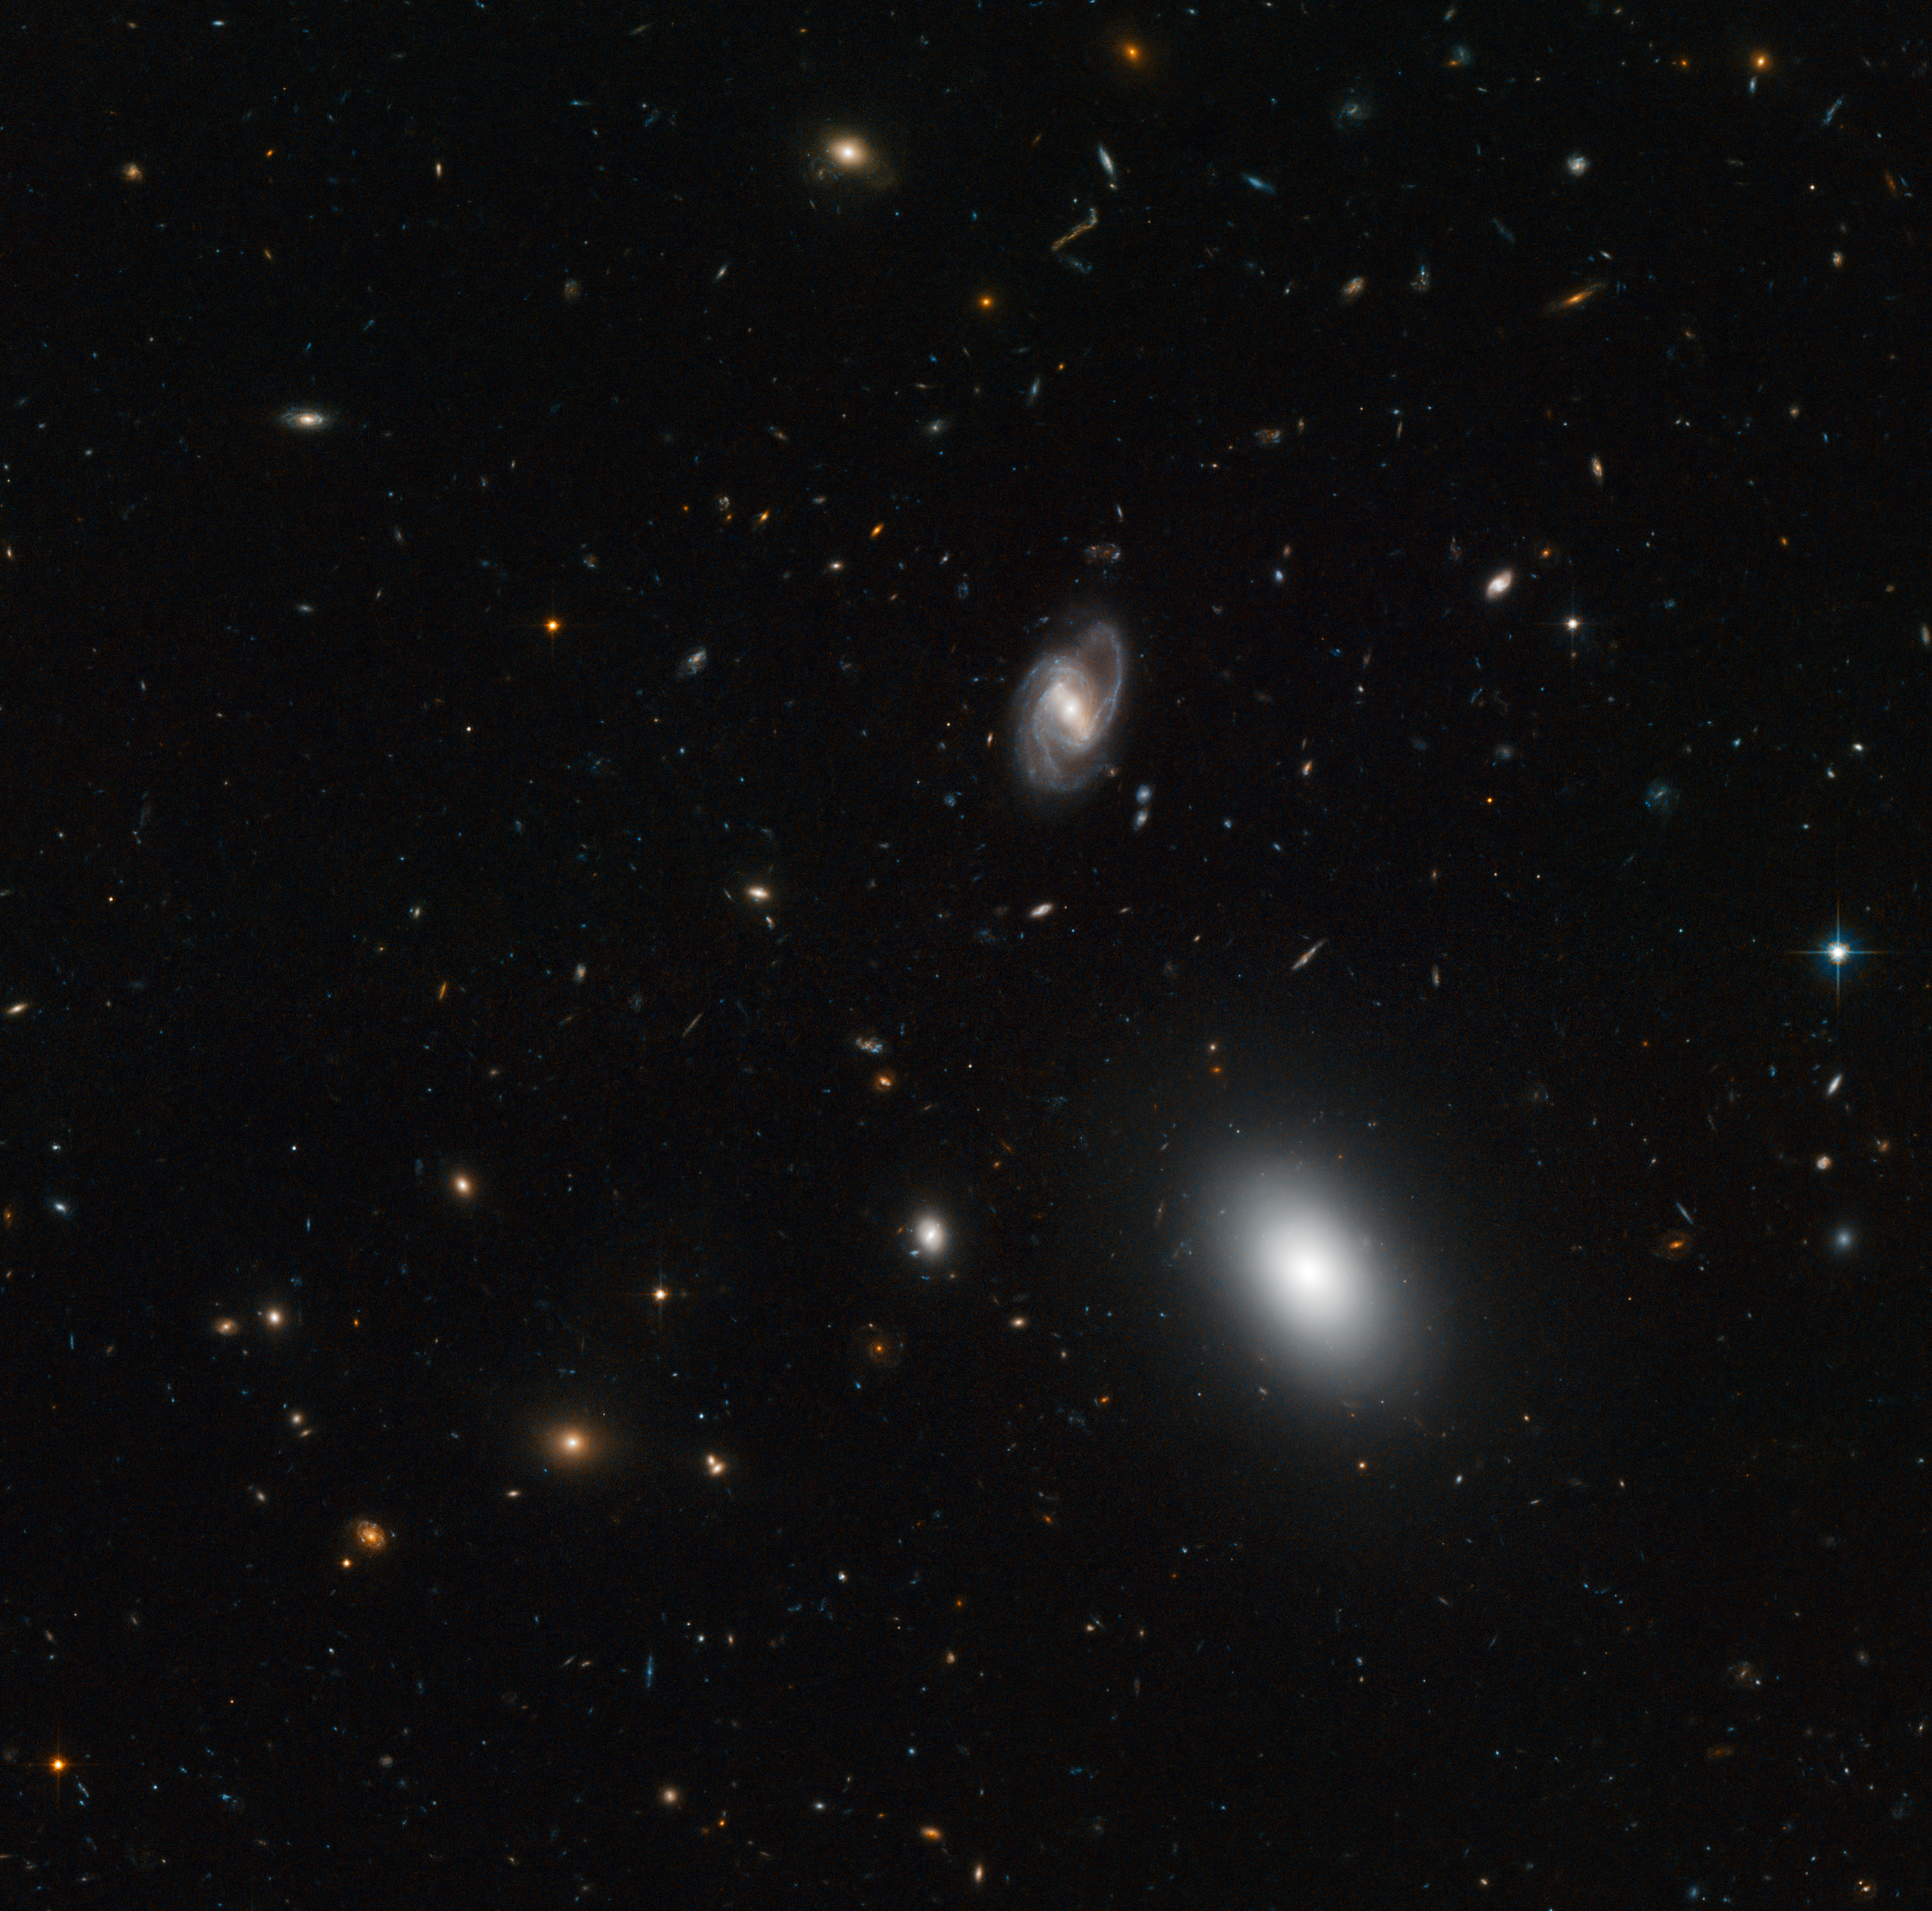

A snapshot of galactic evolution

Galaxies come in a variety of shapes and sizes, and these features change as they evolve. Some, like the galaxy in the centre of this NASA/ESA Hubble Space Telescope image, are beautiful spirals with graceful curved arms, while others are fuzzy oval-shaped blobs like the large object showing up near the bottom right of the frame. Others still are rather irregular in shape, such as the orange galaxy at the top of the image, which resembles a tiny wobbling string.

This picture is one of the few hundred exposures taken with Hubble’s Advanced Camera for Surveys to assemble the “Extended Groth Strip”. This strip, named after the Princeton University astronomer Edward Groth, is a composite picture of a rectangular region of the sky in the constellation of Ursa Major. It covers a relatively small area in the sky — equivalent to roughly the width of a finger stretched at arms’ length — but includes at least 50 000 galaxies.

The images that make up the Extended Groth Strip allow astronomers to peer into the last eight billion years of the Universe’s history and to see galaxies at various stages of their evolution. The large elliptical and spiral objects we see in the foreground of this image are fully-formed adult galaxies. But many of the ones in the background, fuzzier and more peculiar in shape, are representative of a time when galaxies were undergoing active formation.

Images like these help astronomers to understand how galaxies change in size and shape as they evolve, from their early formative years — punctuated by violent events such as the growth of the vast black holes at their centres and collisions with other galaxies — into their quieter adult lives.

This picture was created from visible and infrared exposures taken with the Wide Field Channel of Hubble’s Advanced Camera for Surveys

Credit: ESA/Hubble & NASA